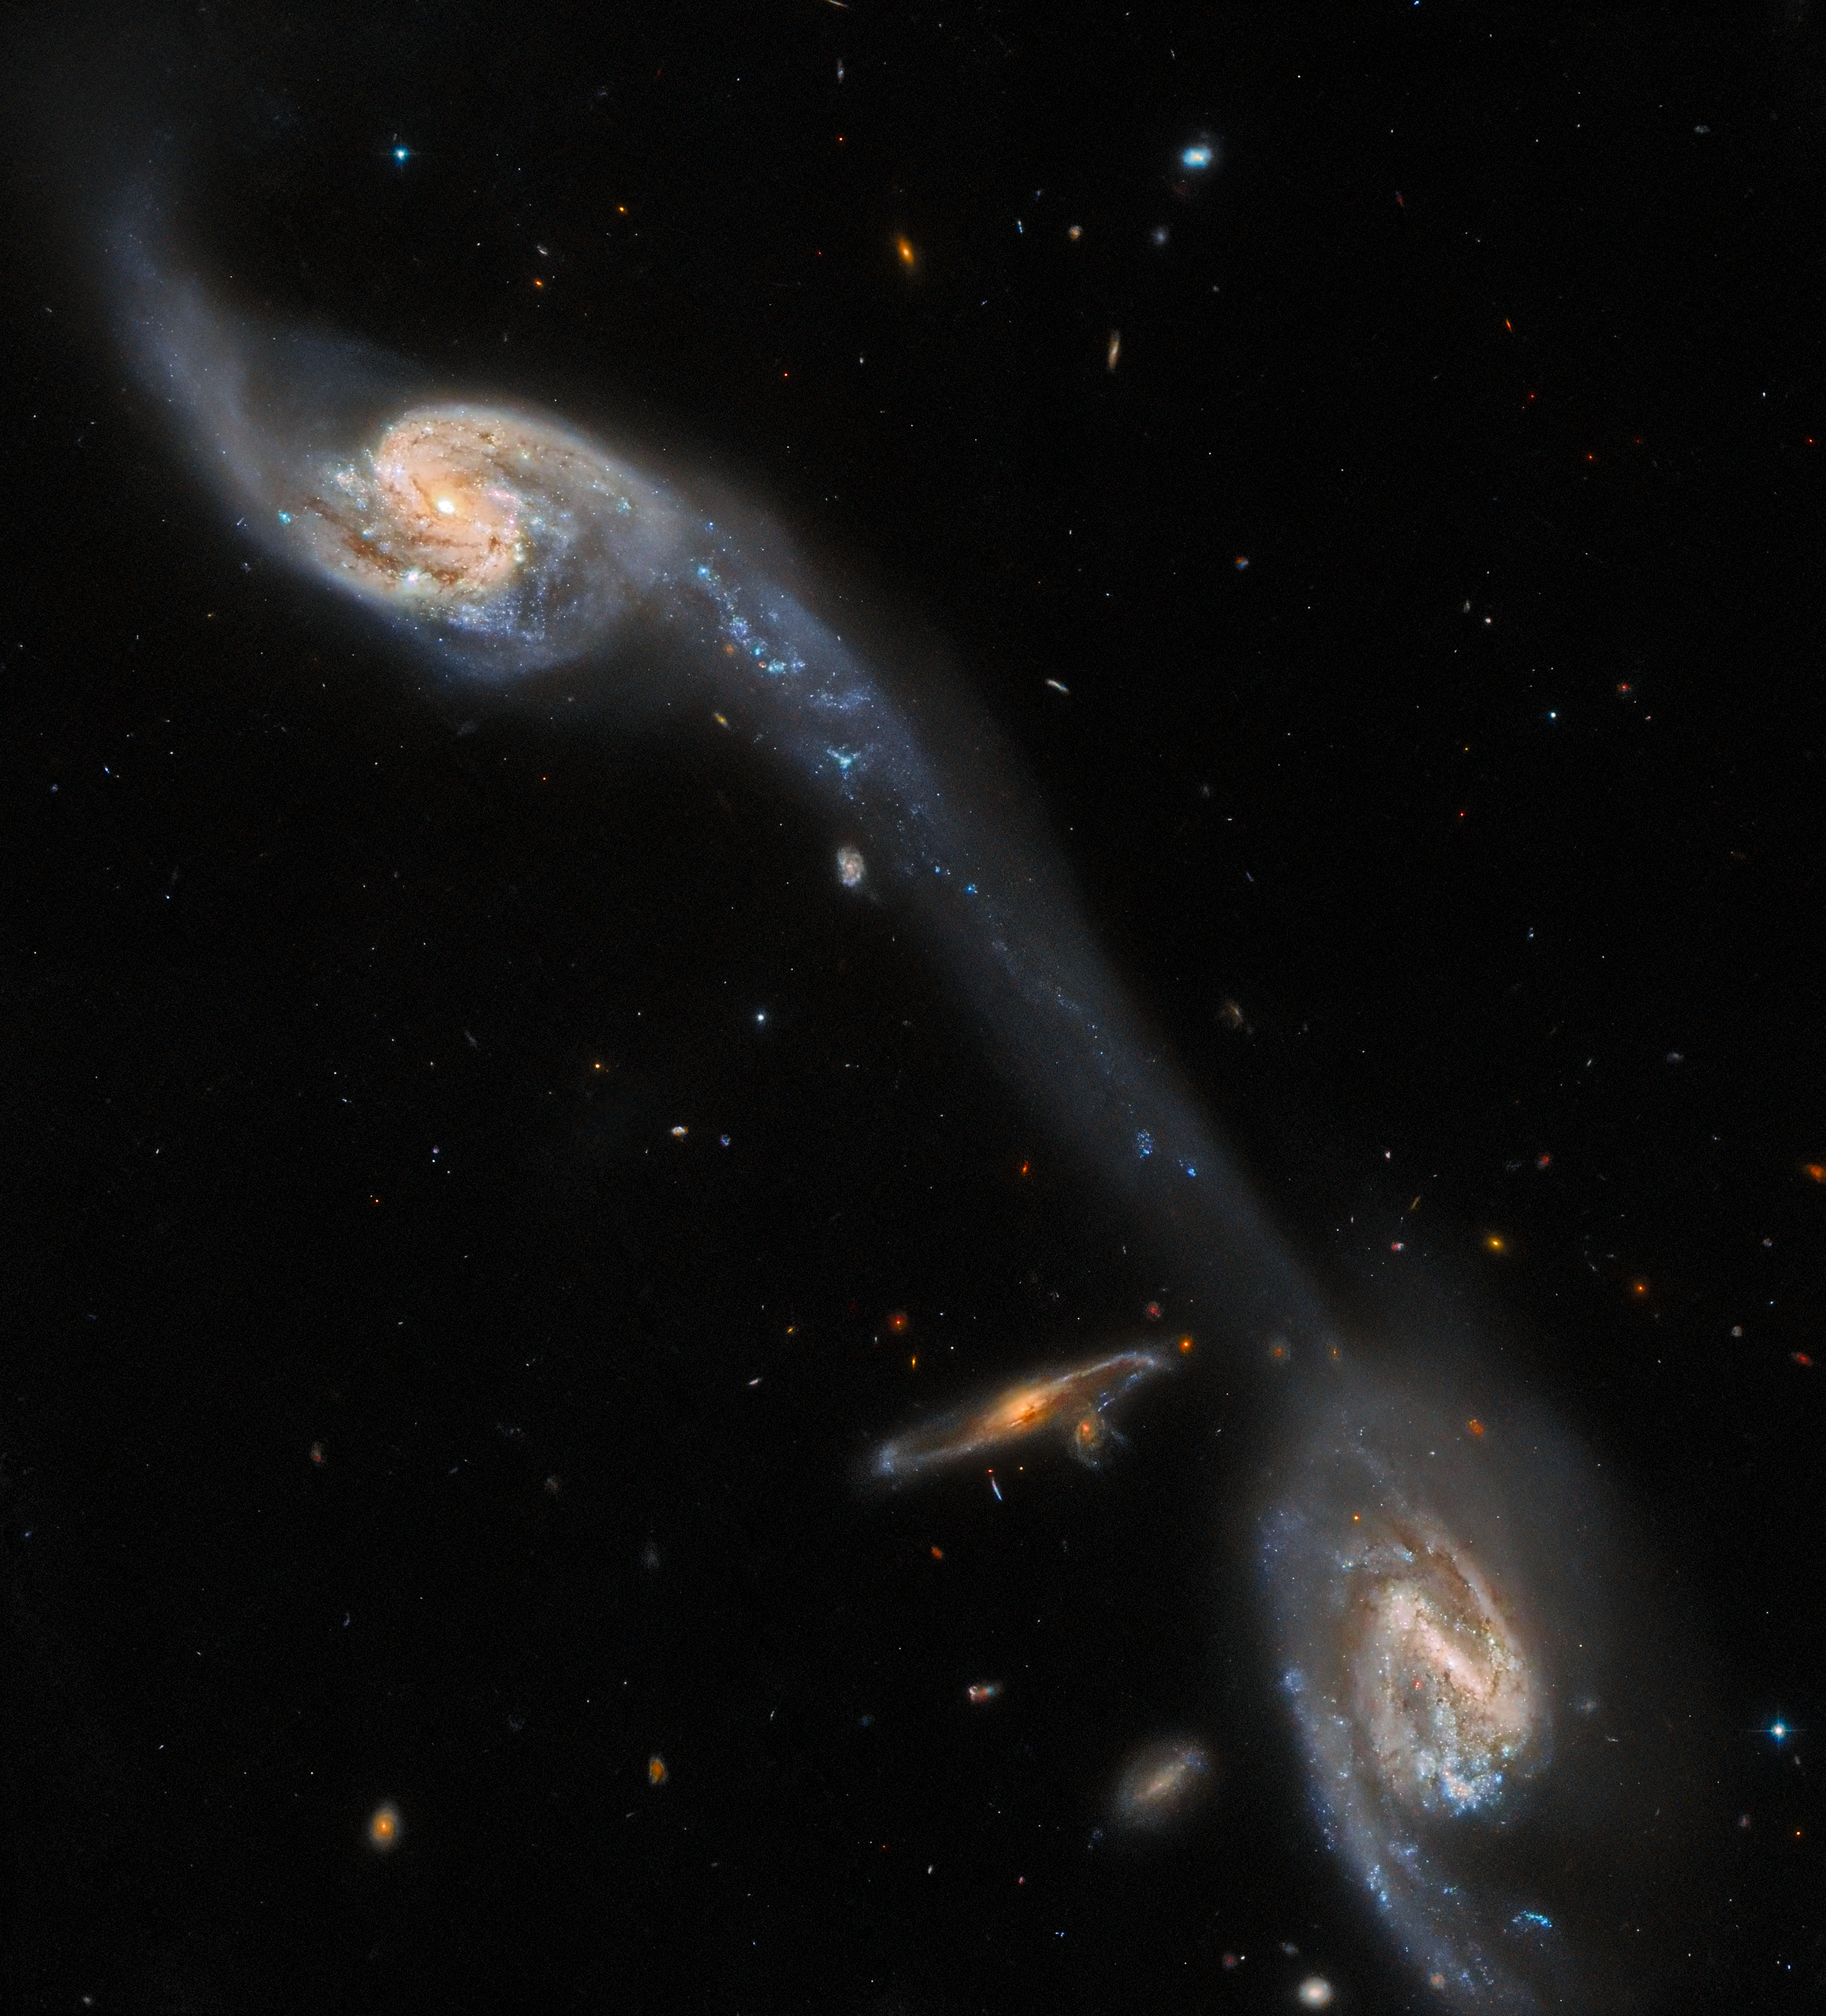

Hubble Inspects A Pair of Space Oddities

This image from the NASA/ESA Hubble Space Telescope shows two of the galaxies in the galactic triplet Arp 248 — also known as Wild's Triplet — which lies around 200 million light-years from Earth in the constellation Virgo. The two large spiral galaxies visible in this image — which flank a smaller, unrelated background spiral galaxy — seem to be connected by a luminous bridge. This elongated stream of stars and interstellar dust is known as a tidal tail, and it was formed by the mutual gravitational attraction of the two foreground galaxies.

This observation comes from a project which delves into two rogues’ galleries of weird and wonderful galaxies: A Catalogue Of Southern Peculiar Galaxies And Associations, compiled by astronomers Halton Arp and Barry Madore, and the Atlas of Peculiar Galaxies, compiled by Halton Arp. Each collection contains a menagerie of spectacularly peculiar galaxies, including interacting galaxies such as Arp 248, as well as one- or three-armed spiral galaxies, galaxies with shell-like structures, and a variety of other space oddities.

Hubble used its Advanced Camera for Surveys to scour this menagerie of eccentric galaxies in search of promising candidates for future observations with the NASA/ESA/CSA James Webb Space Telescope, the Atacama Large Millimeter/submillimeter Array, and Hubble itself. With such a wealth of astronomical objects to study in the night sky, projects such as this, which guide future observations, are a valuable investment of observing time. As well as the scientific merits of observing these weird and wonderful galaxies, they were also — very unusually — selected as Hubble targets because of their visual appeal to the general public!

Credit: ESA/Hubble & NASA, Dark Energy Survey/DOE/FNAL/DECam/CTIO/NOIRLab/NSF/AURA, J. Dalcanton